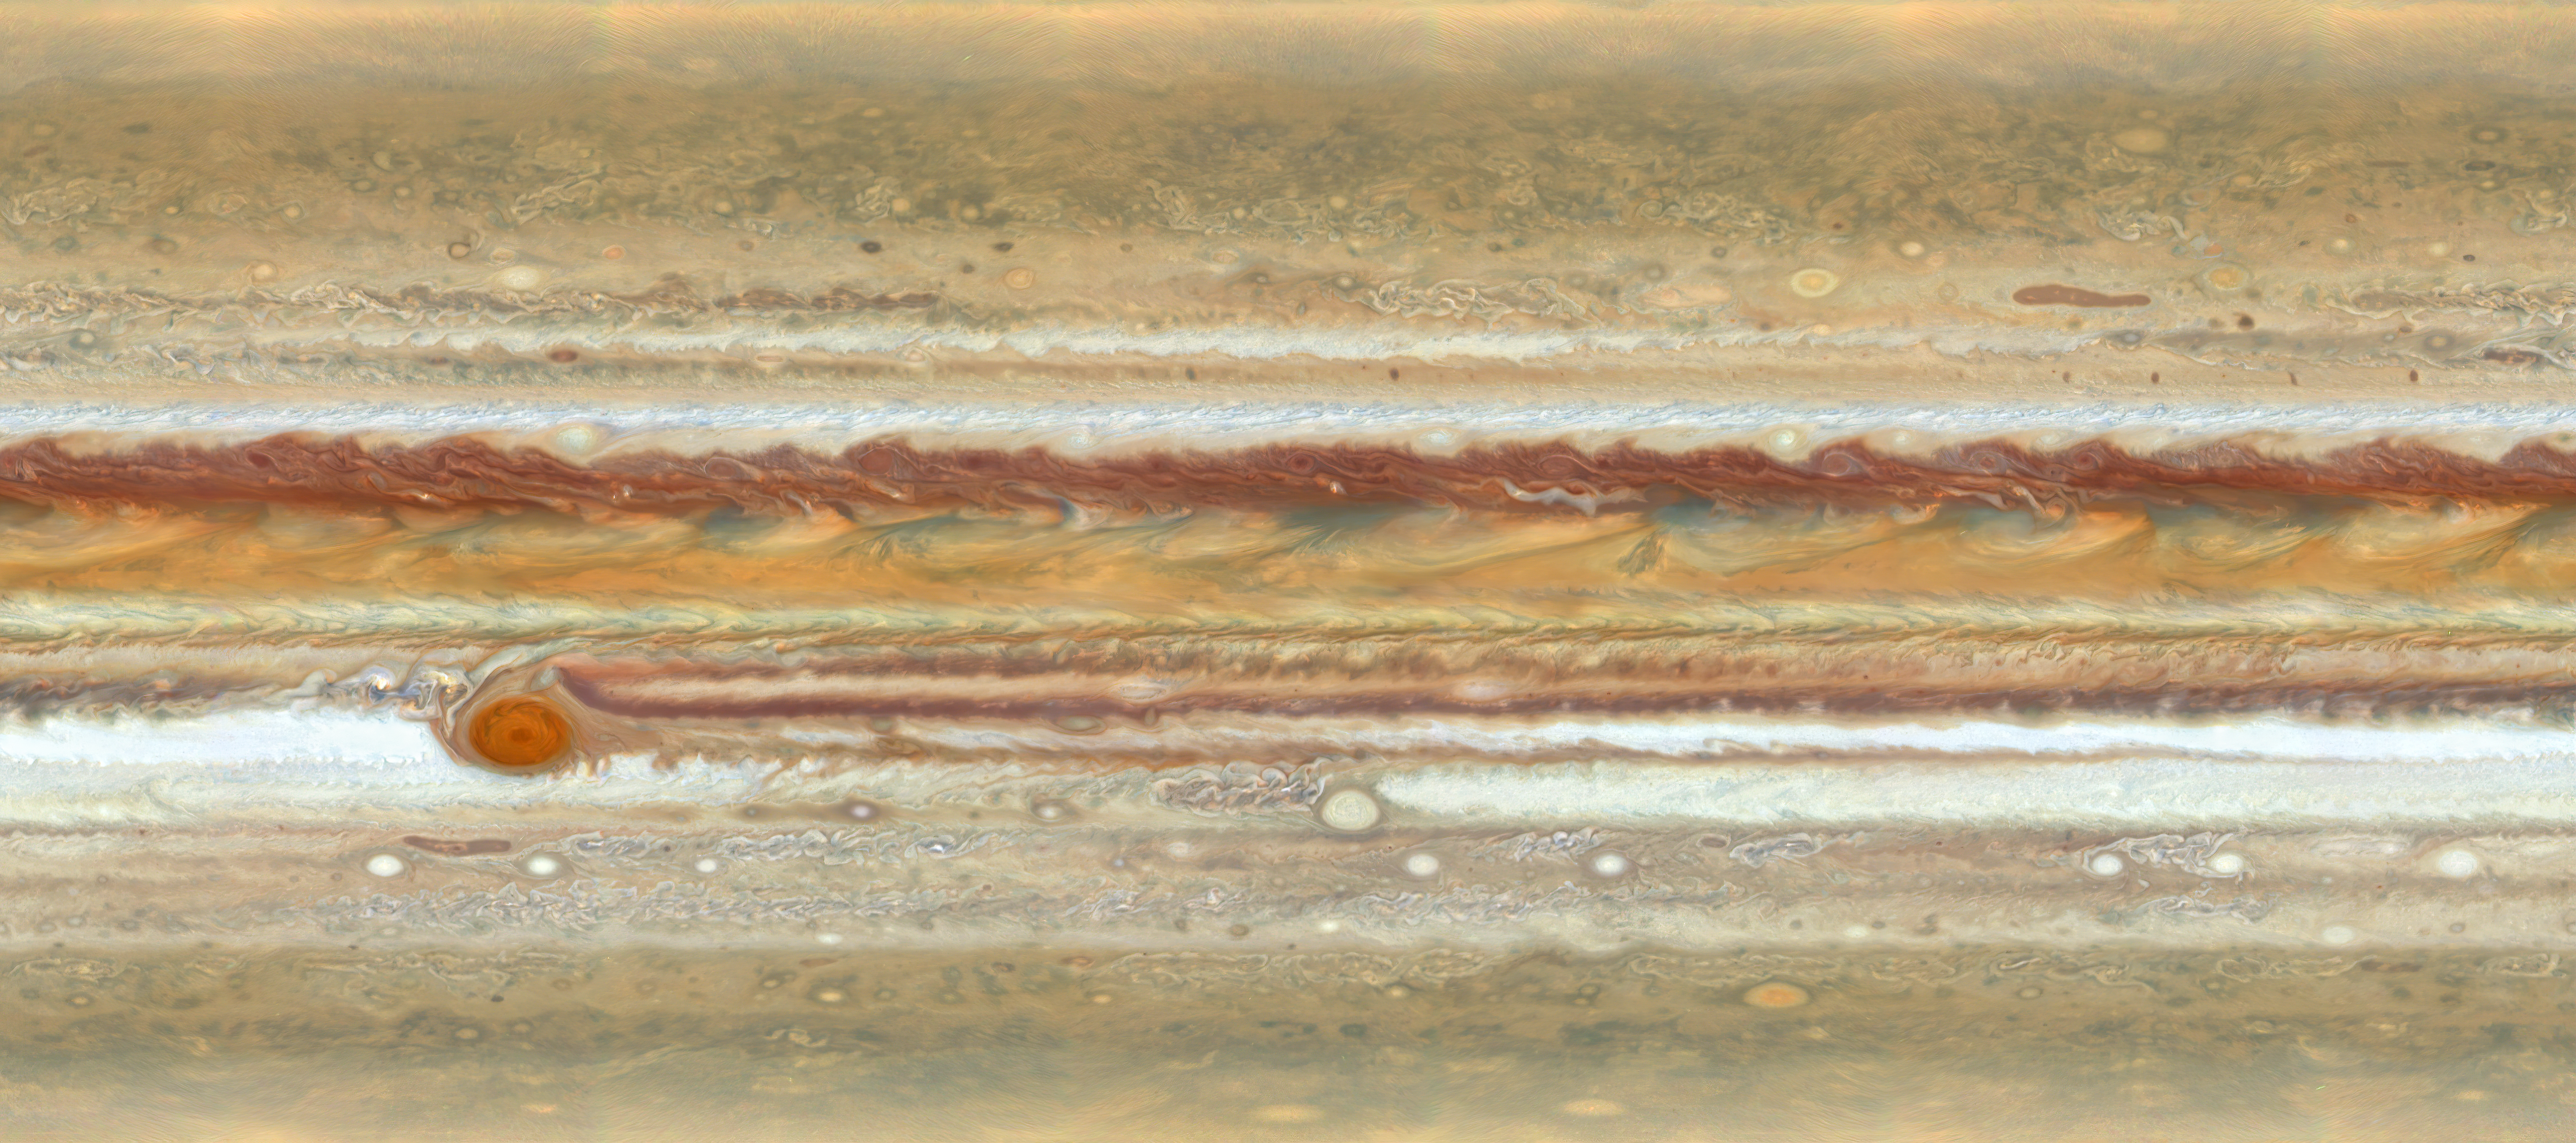

A Close-Up Look at Jupiter’s Dynamic Atmosphere

The NASA/ESA Hubble Space Telescope reveals the intricate, detailed beauty of Jupiter’s clouds in this new image taken on 27 June 2019 by Hubble’s Wide Field Camera 3, when the planet was 644 million kilometres from Earth. The image features the distinct bands of roiling clouds that are characteristic of Jupiter’s atmosphere and represents a

stretched-out map of the entire planet.

Researchers combined several Hubble exposures to create this flat map, which excludes the polar regions (above 80 degrees latitude). These observations of Jupiter form part of the Outer Planet Atmospheres Legacy (OPAL) programme.

Credit: NASA, ESA, A. Simon (Goddard Space Flight Center), and M.H. Wong (University of California, Berkeley)